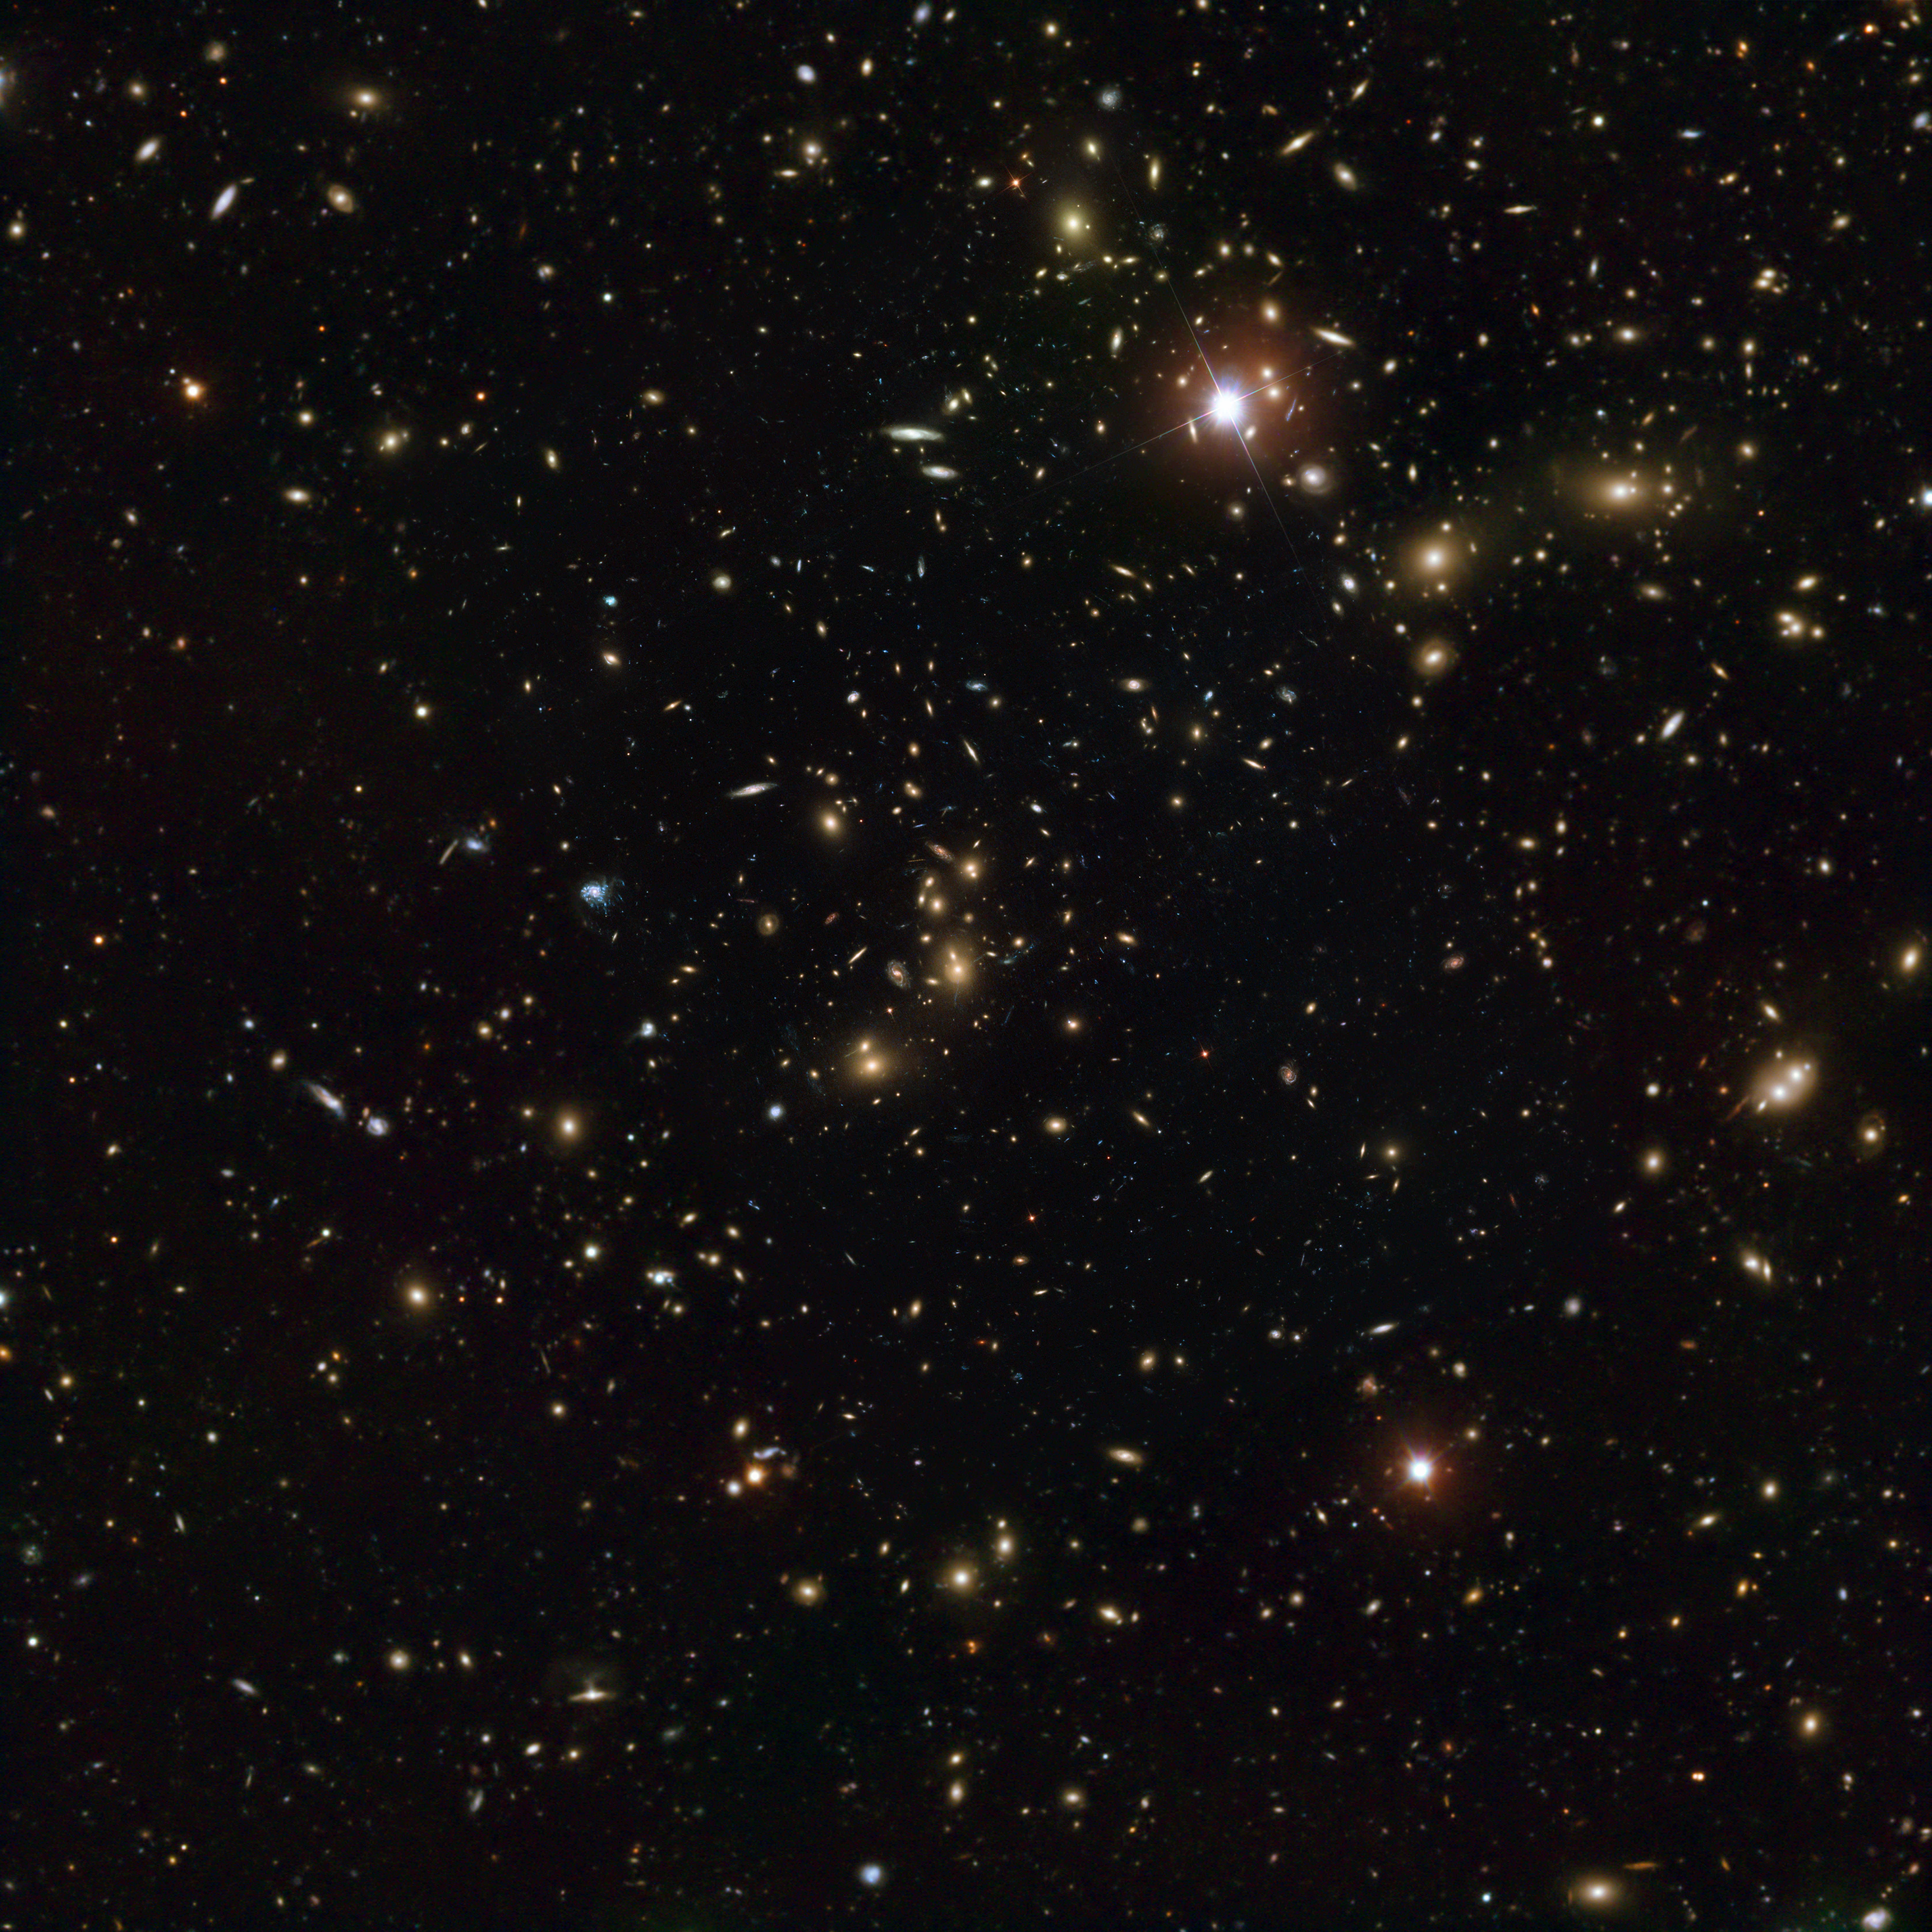

Pandora’s Cluster — The merging galaxy cluster Abell 2744

This image of galaxy cluster Abell 2744 combines data from the NASA/ESA Hubble Space Telescope’s Advanced Camera for Surveys, with an image taken with the European Southern Observatory’s Very Large Telescope (VLT). Hubble provides the central, most detailed part of the image, while the VLT, which has a wider field of view, provides the outer parts of the image.

This object has been nicknamed Pandora’s Cluster because of the many different and strange phenomena that were unleashed by a huge collision that occurred over a period of 350 million years. A simultaneous pile-up between at least four separate clusters has produced strange effects that have never been seen together before.

Credit: NASA, ESA, ESO and D. Coe (STScI)/J. Merten (Heidelberg/Bologna)